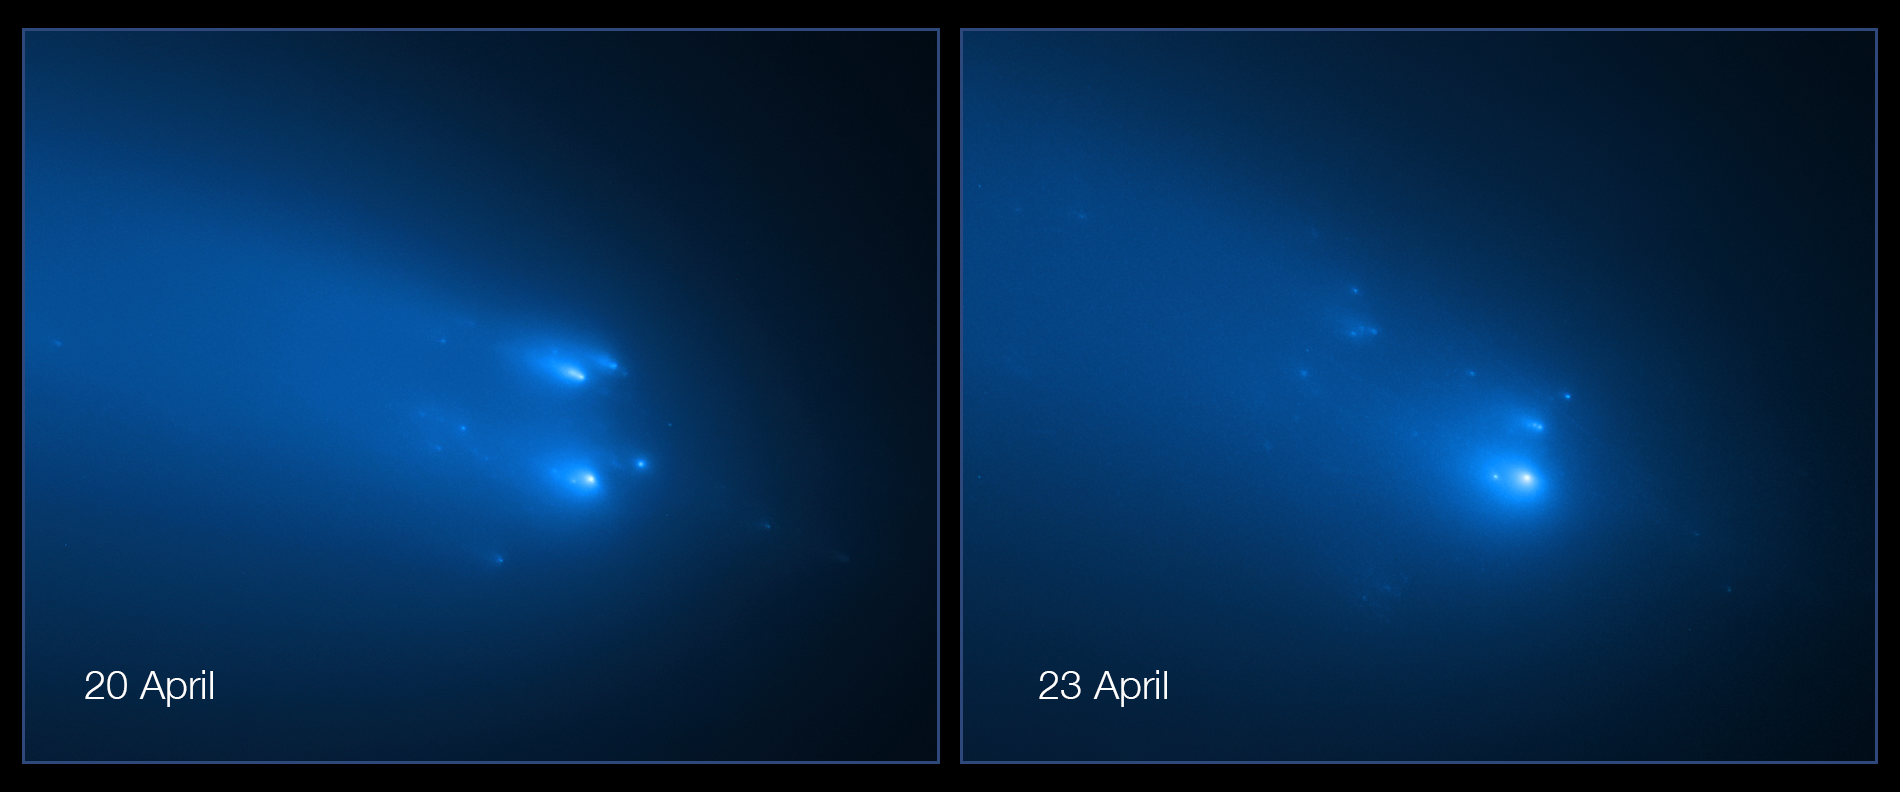

Hubble’s New Observations of Comet C/2019 Y4 (ATLAS)

The NASA/ESA Hubble Space Telescope has provided astronomers with the sharpest view yet of the breakup of Comet C/2019 Y4 (ATLAS). The telescope resolved roughly 30 fragments of the comet on 20 April and 25 pieces on 23 April.

The comet was first discovered in December 2019 by the ATLAS (Asteroid Terrestrial-impact Last Alert System) and its fragmentation was confirmed in April 2020.

Credit: NASA, ESA, D. Jewitt (UCLA), Q. Ye (University of Maryland)